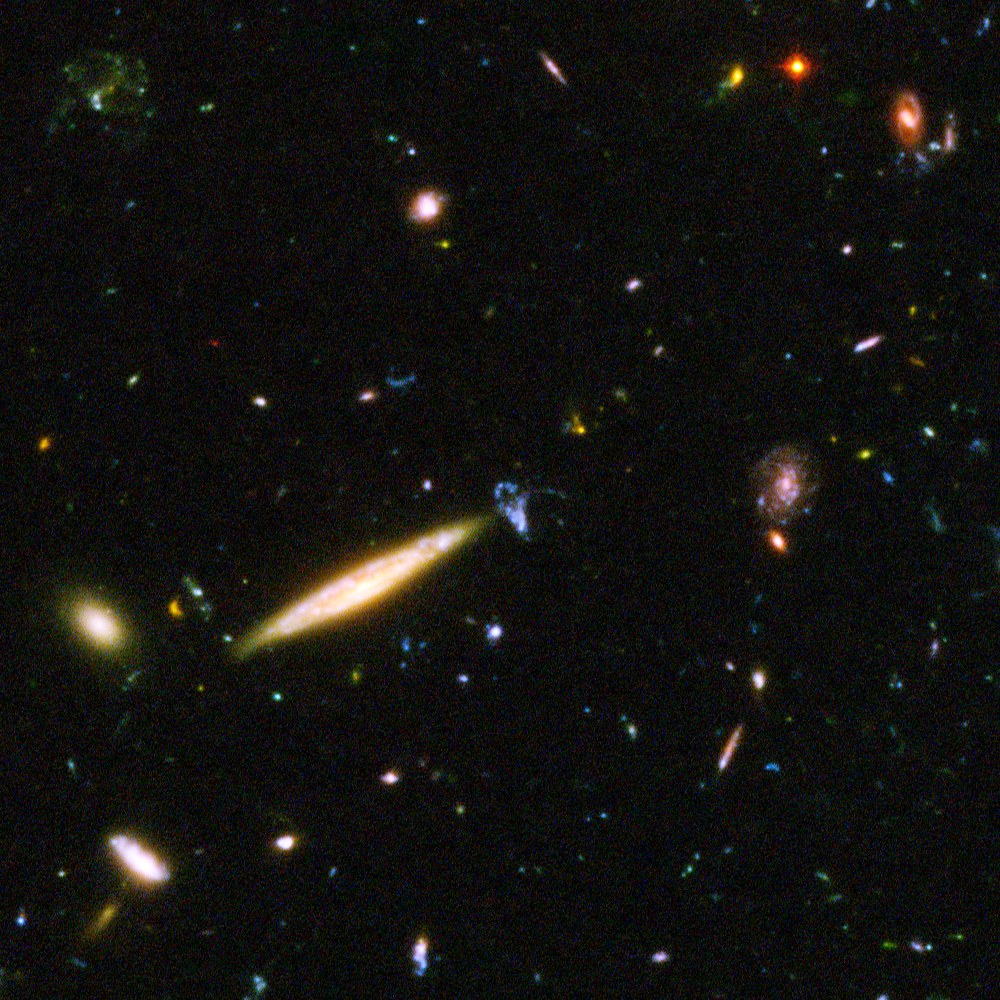

Hubble reveals galactic drama [image 2]

A galactic brawl. A close encounter with a spiral galaxy. Blue wisps of galaxies. These close-up snapshots of galaxies in the Hubble Ultra Deep Field reveal the drama of galactic life. Here an edge-on spiral galaxy fending off a weirdly shaped blue galaxy. .

The galaxies in this panel were plucked from a harvest of nearly 10,000 galaxies in the Ultra Deep Field, the deepest visible-light image of the cosmos.

The Ultra Deep Field observations, taken by the Advanced Camera for Surveys, represent a narrow, "deep" view of the cosmos. Peering into the Ultra Deep Field is like looking through a 2.5 metre-long soda straw.

In ground-based images, the patch of sky in which the galaxies reside (just one-tenth the diameter of the full Moon) is largely empty. Located in the constellation Fornax, the region is so empty, in fact, that only a handful of stars within the Milky Way galaxy can be seen in the image.

In this image, blue and green correspond to colours that can be seen by the human eye, such as hot, young, blue stars and the glow of Sun-like stars in the disks of galaxies. Red represents near-infrared light, which is invisible to the human eye, such as the red glow of dust-enshrouded galaxies.

The image required 800 exposures taken over the course of 400 Hubble orbits around Earth. The total amount of exposure time was 11.3 days, taken between Sept. 24, 2003 and Jan. 16, 2004.

Credit: NASA, ESA, and S. Beckwith (STScI) and the HUDF Team